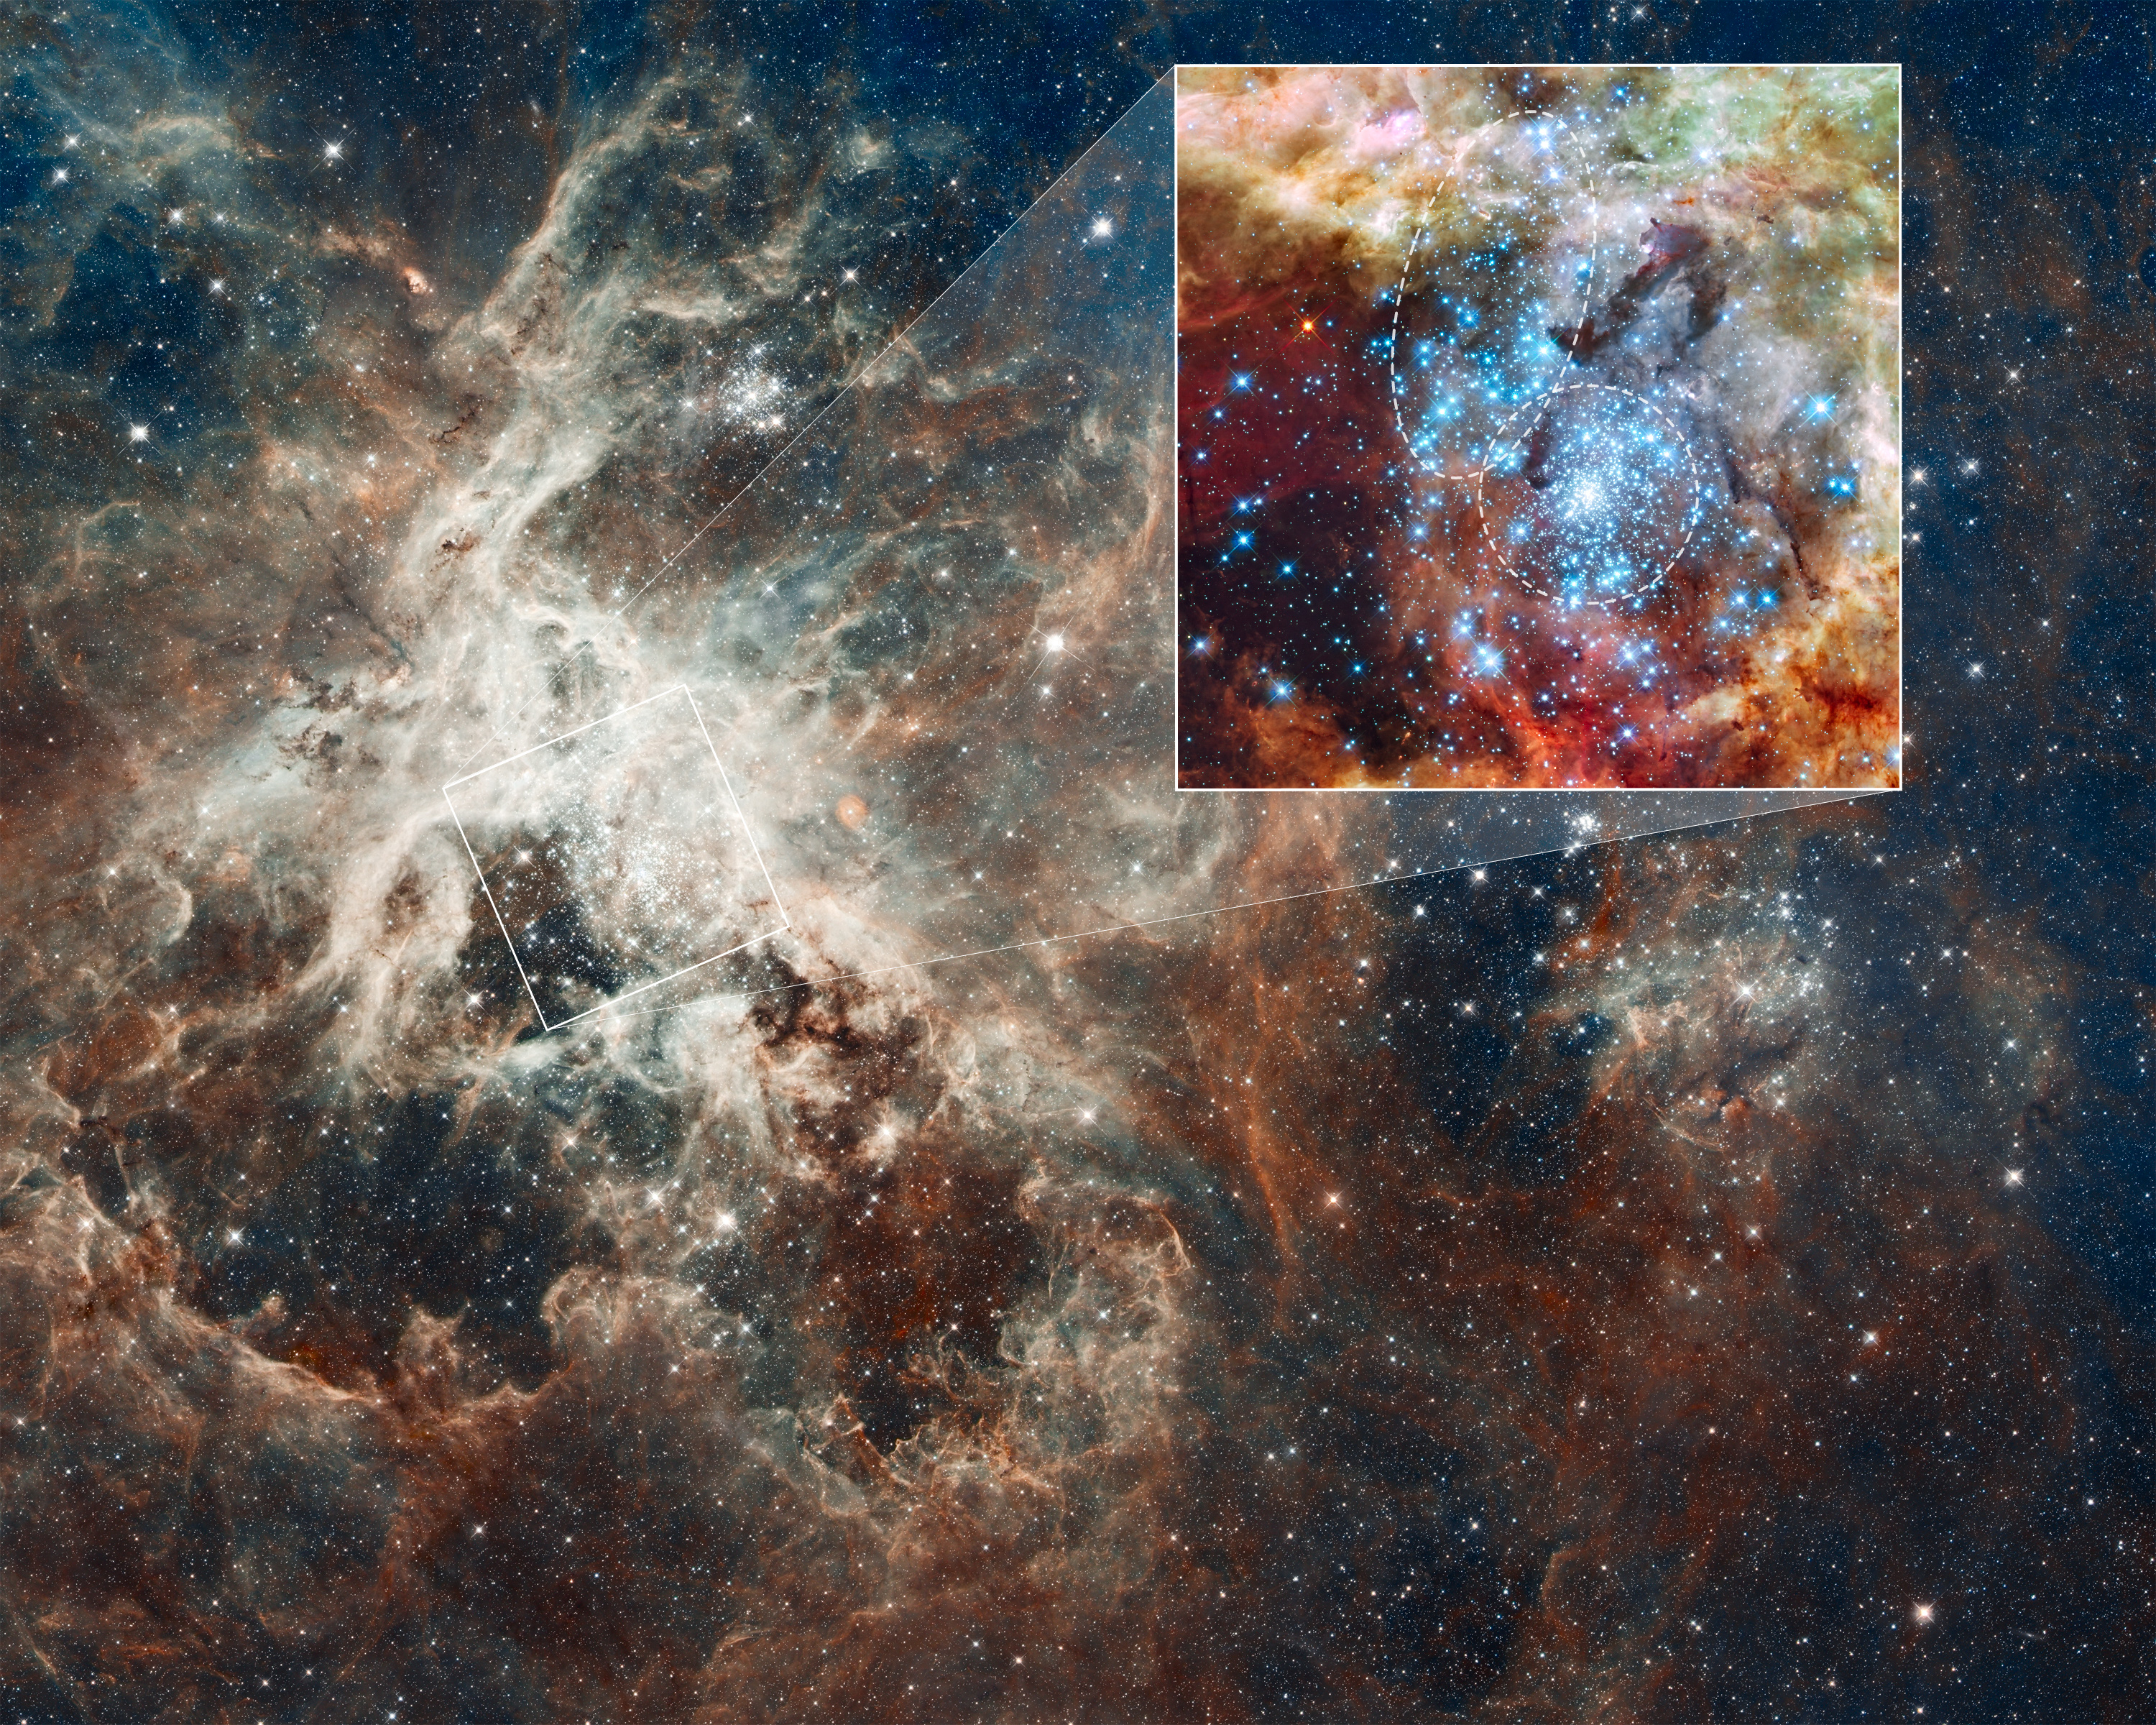

30 Doradus nebula and star clusters

This is a Hubble Space Telescope image of a pair of star clusters that are believed to be in the early stages of colliding. The clusters lie in the gigantic 30 Doradus Nebula, which is 170,000 light-years from Earth.

Hubble's circumstantial evidence for the impending collision comes from seeing an elongated structure in the cluster at upper left, and from measuring a different age between the two clusters.

Also, there is an unusually large number of high-velocity stars expelled from the region. This is a normal byproduct of a process called core collapse, in which more-massive stars sink to the centre of a cluster by ejecting lower-mass stars. However, both clusters are too young to have experienced core collapse. The ejected stars can be better explained if the two clusters are merging.

This nearby example of cluster interaction yields insights into how star clusters may have formed in the early Universe.

The Hubble image at upper right was made with Wide Field Camera 3 observations taken 20-27 October, 2009. The blue colour is light from the hottest, most massive stars; the green from the glow of oxygen; and the red from fluorescing hydrogen.

The colours in the wide-field image, made with Hubble's Wide Field Camera 3 and the Advanced Camera for Surveys, represent the hot gas that dominates regions of the image. Red signifies hydrogen gas and blue, oxygen. Hubble made the photo mosaic in October 2011.

Credit: NASA, ESA, D. Lennon and E. Sabbi (ESA/STScI), J. Anderson, S.E. de Mink, R. van der Marel, T. Sohn, and N. Walborn (STScI), N. Bastian (Excellence Cluster, Munich), L. Bedin (INAF, Padua), E. Bressert (ESO), P. Crowther (University of Sheffield), A. de Koter (University of Amsterdam), C. Evans (UKATC/STFC, Edinburgh), A. Herrero (IAC, Tenerife), N. Langer (AifA, Bonn), I. Platais (JHU), and H. Sana (University of Amsterdam)Upper Right Image Credit: NASA, ESA, R. O'Connell (University of Virginia), and the WFC3 Science Oversight Committee